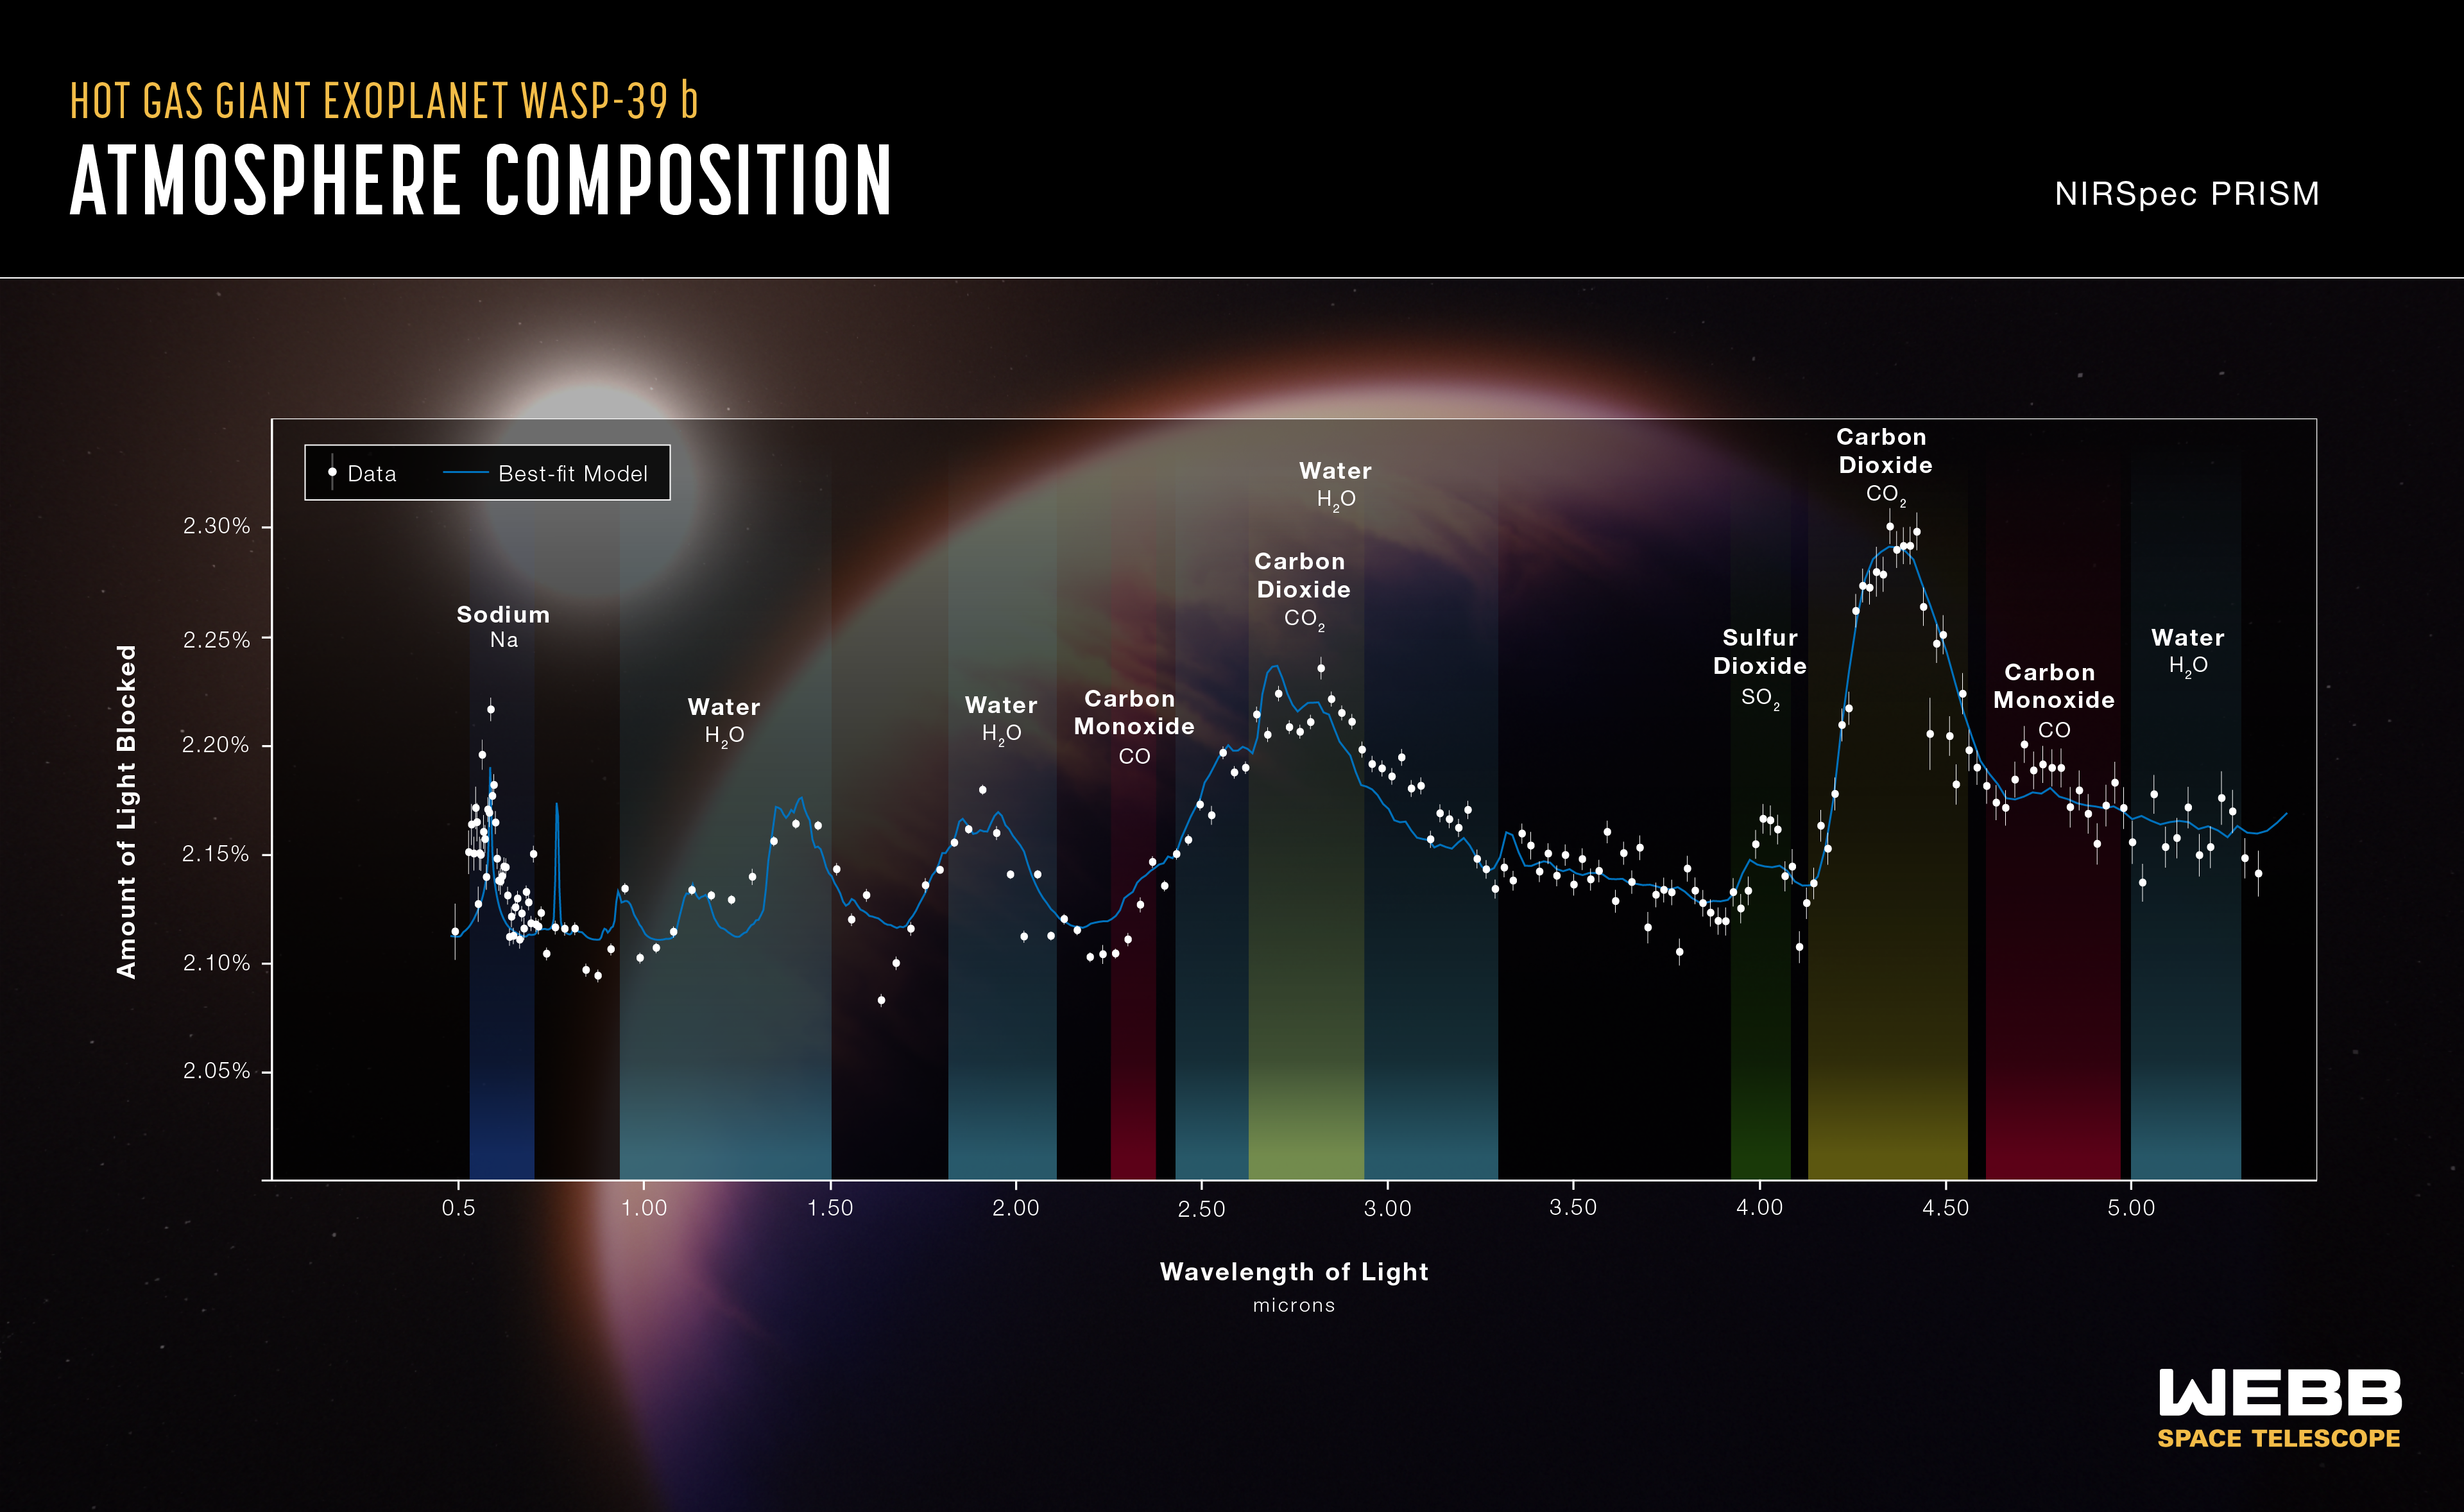

WASP-39 b Atmospheric Composition (NIRSpec PRISM)

The atmospheric composition of the hot gas giant exoplanet WASP-39 b has been revealed by the NASA/ESA/CSA James Webb Space Telescope.

A transmission spectrum is made by comparing starlight filtered through a planet’s atmosphere as it moves in front of the star, to the unfiltered starlight detected when the planet is beside the star. Each of the data points (white circles) on these graphs represents the amount of a specific wavelength of light that is blocked by the planet and absorbed by its atmosphere. Wavelengths that are preferentially absorbed by the atmosphere appear as peaks in the transmission spectrum.

The blue line is a best-fit model that takes into account the data, the known properties of WASP-39 b and its star (e.g., size, mass, temperature), and assumed characteristics of the atmosphere. Researchers can vary the parameters in the model – changing unknown characteristics like cloud height in the atmosphere and abundances of various gases – to get a better fit and further understand what the atmosphere is really like.

This graph displays data from Webb's NIRSpec instrument, indicating signatures of potassium (K), water (H2O), carbon monoxide (CO), sulfur dioxide (SO2), carbon dioxide (CO2), and sodium (Na).

Credit: NASA, ESA, CSA, J. Olmsted (STScI)